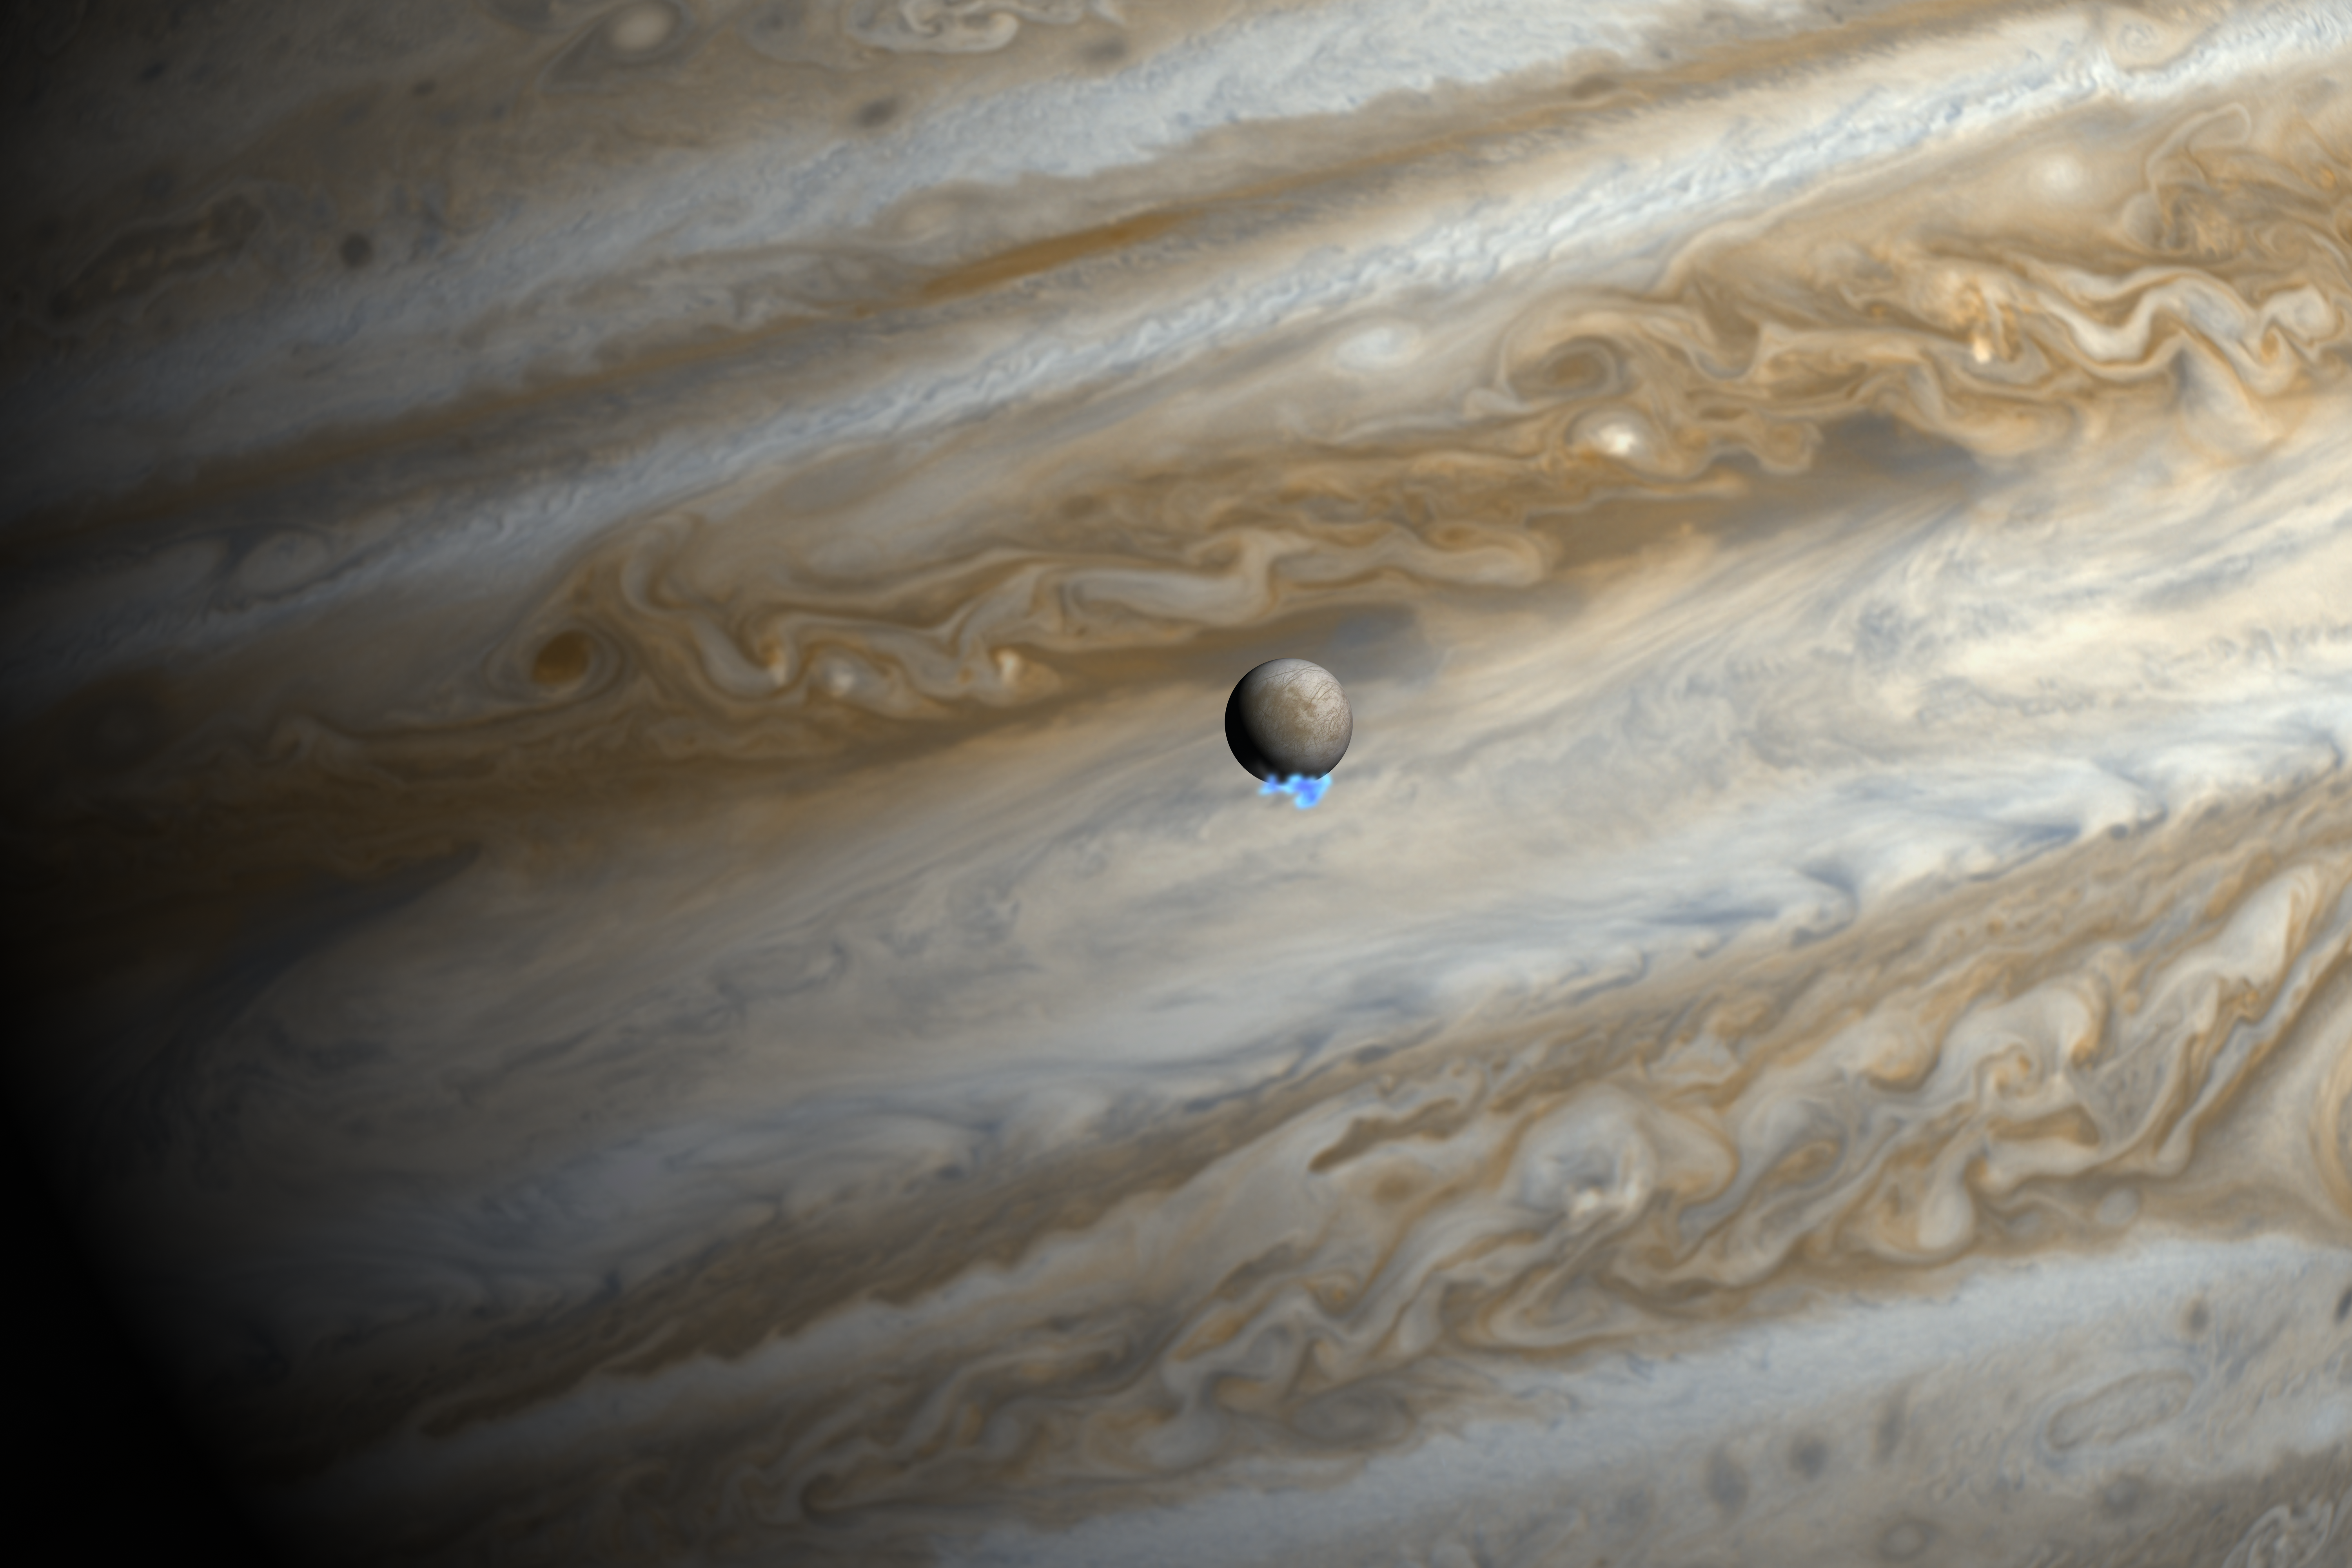

Water vapour plumes on Jupiter's moon Europa (artist's impression)

This artist's impression shows Jupiter and its moon Europa using actual Jupiter and Europa images in visible light. The Hubble ultraviolet images showing the faint emission from the water vapour plumes have been superimposed, respecting the size but not the brightness of the plumes.

Credit: NASA, ESA, and M. Kornmesser. Science Credit: NASA, ESA, L. Roth (Southwest Research Institute and University of Cologne, Germany), J. Saur (University of Cologne, Germany), K. Retherford (Southwest Research Institute), D. Strobel and P. Feldman (Johns Hopkins University), M. McGrath (Marshall Space Flight Center), and F. Nimmo (University of California, Santa Cruz)